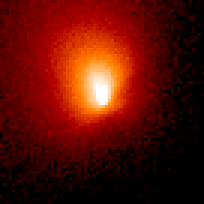

Comet Hale-Bopp

This is a series of Hubble Space Telescope observations of the region around the nucleus of Hale-Bopp, taken on eight different dates since September 1995. They chronicle changes in the evolution of the nucleus as it moves ever closer to, and is warmed by, the sun.

Credit: Harold Weaver (Johns Hopkins University) and NASA/ESA